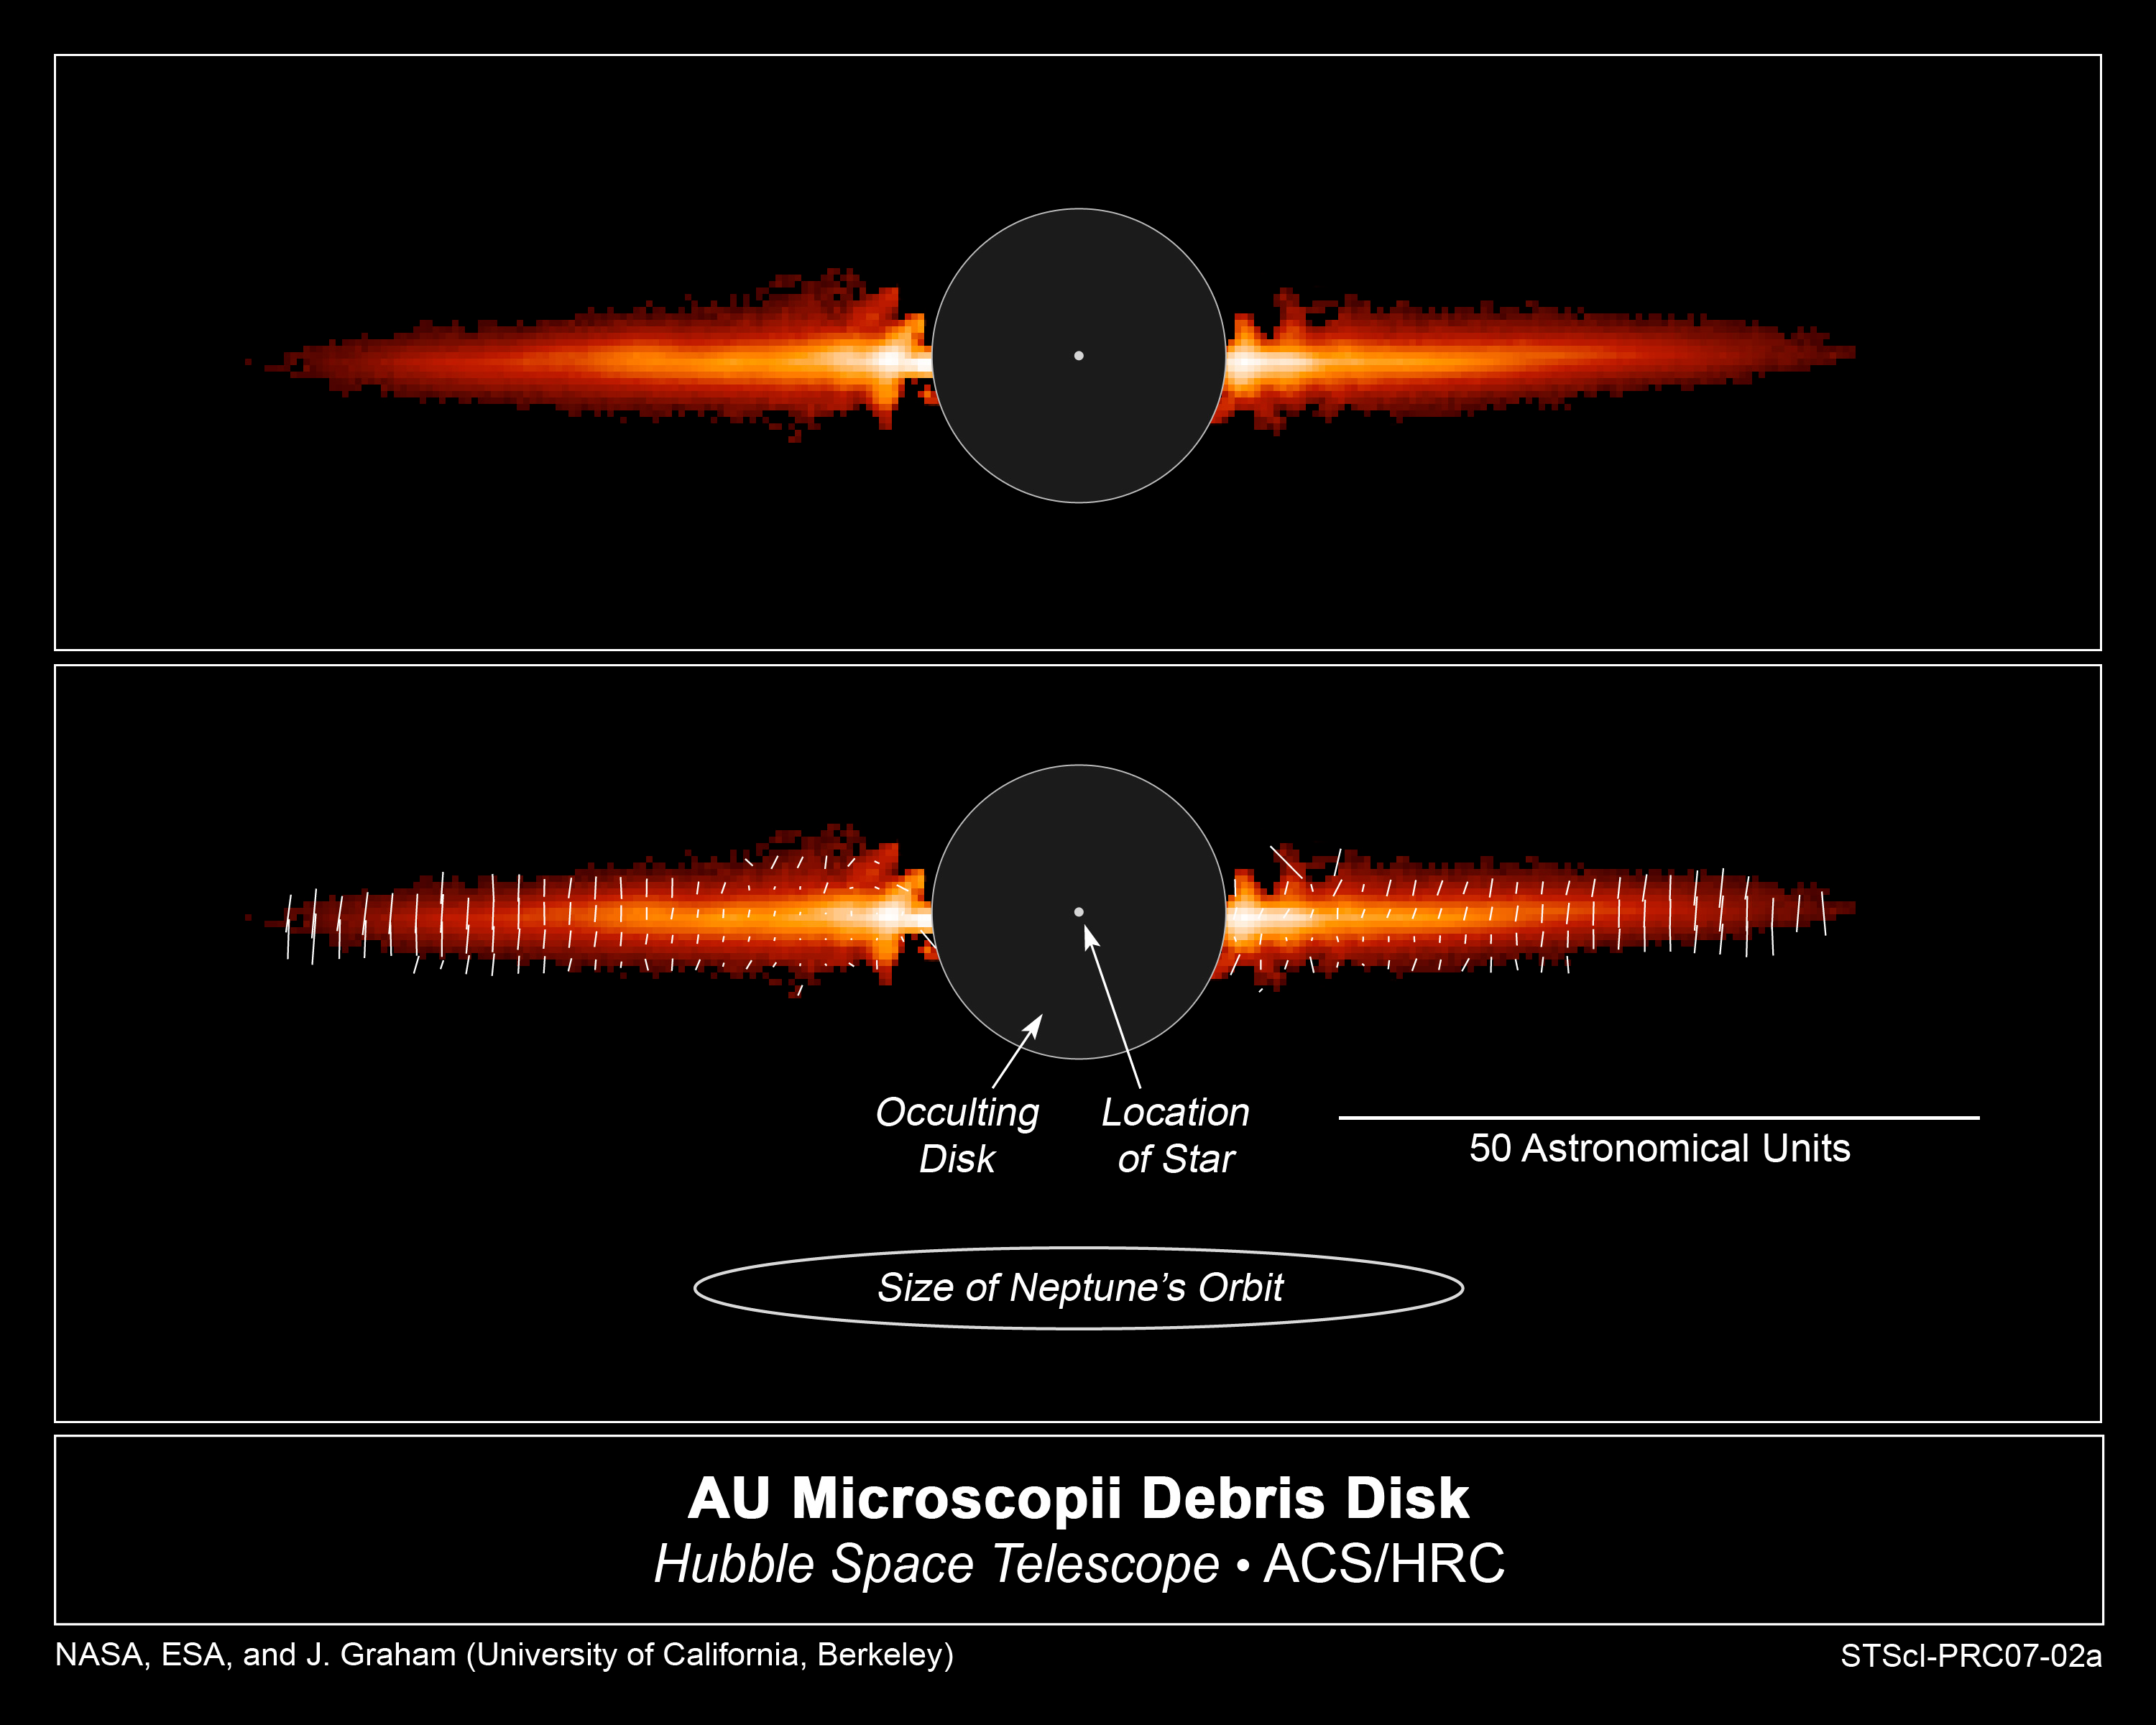

Hubble observations provide insight into planet birth

The top view, taken with NASA/ESA Hubble Space Telescope, shows light reflected off dust in a debris disk around the young star AU Microscopii. The bottom frame points out the important features in this image.

The image shows the flattened disk, appearing like Saturn's rings, but seen almost exactly edge-on. Normally, starlight would be so bright that the debris disk could not be seen. But astronomers used the coronagraph on Hubble's Advanced Camera for Surveys, which blocked out most of the starlight. The black circle in the center of the image is the coronagraph's occulting disk. The disk in this image extends to about 8 billion miles (almost 13 billion kilometres) from the star, or three times farther than Neptune is from the Sun. In other observations, the disk has been traced to at least 11 billion miles.

The only light seen is starlight reflected off dust in the debris disk. Astronomers used polarizing filters on the Advanced Camera to analyze the dust in the disk. The polarizing filters allowed astronomers to study how dust is reflecting the starlight. A polarizing filter lets through light vibrating in one orientation while blocking light oscillating in other directions. The white lines in the bottom image illustrate the direction a light wave is oscillating. The length of the line represents the degree to which all the light waves are oscillating in the same direction.

The astronomers used the polarized light from AU Microscopii's disk to deduce information about the size, shape, and other physical properties of the dust. Astronomers used the polarization study to measure the fluffiness of the dust. The dust is roughly 10 times larger than typical interstellar dust grains, which are about the size of smoke particles. These "snowflakes" are evidence of the early steps in the process by which planets grow from tiny dust grains.

AU Microscopii is a 12-million-year-old red dwarf star that is 32 light-years away in the southern constellation the Microscope. It is a ninth magnitude star that can be seen with binoculars or a small telescope from Hawaii and the southern U.S.

The Hubble image was taken Aug. 1, 2004.

Credit: NASA/ESA, J. R. Graham and P. Kalas (University of California, Berkeley), and B. Matthews (Hertzberg Institute of Astrophysics)